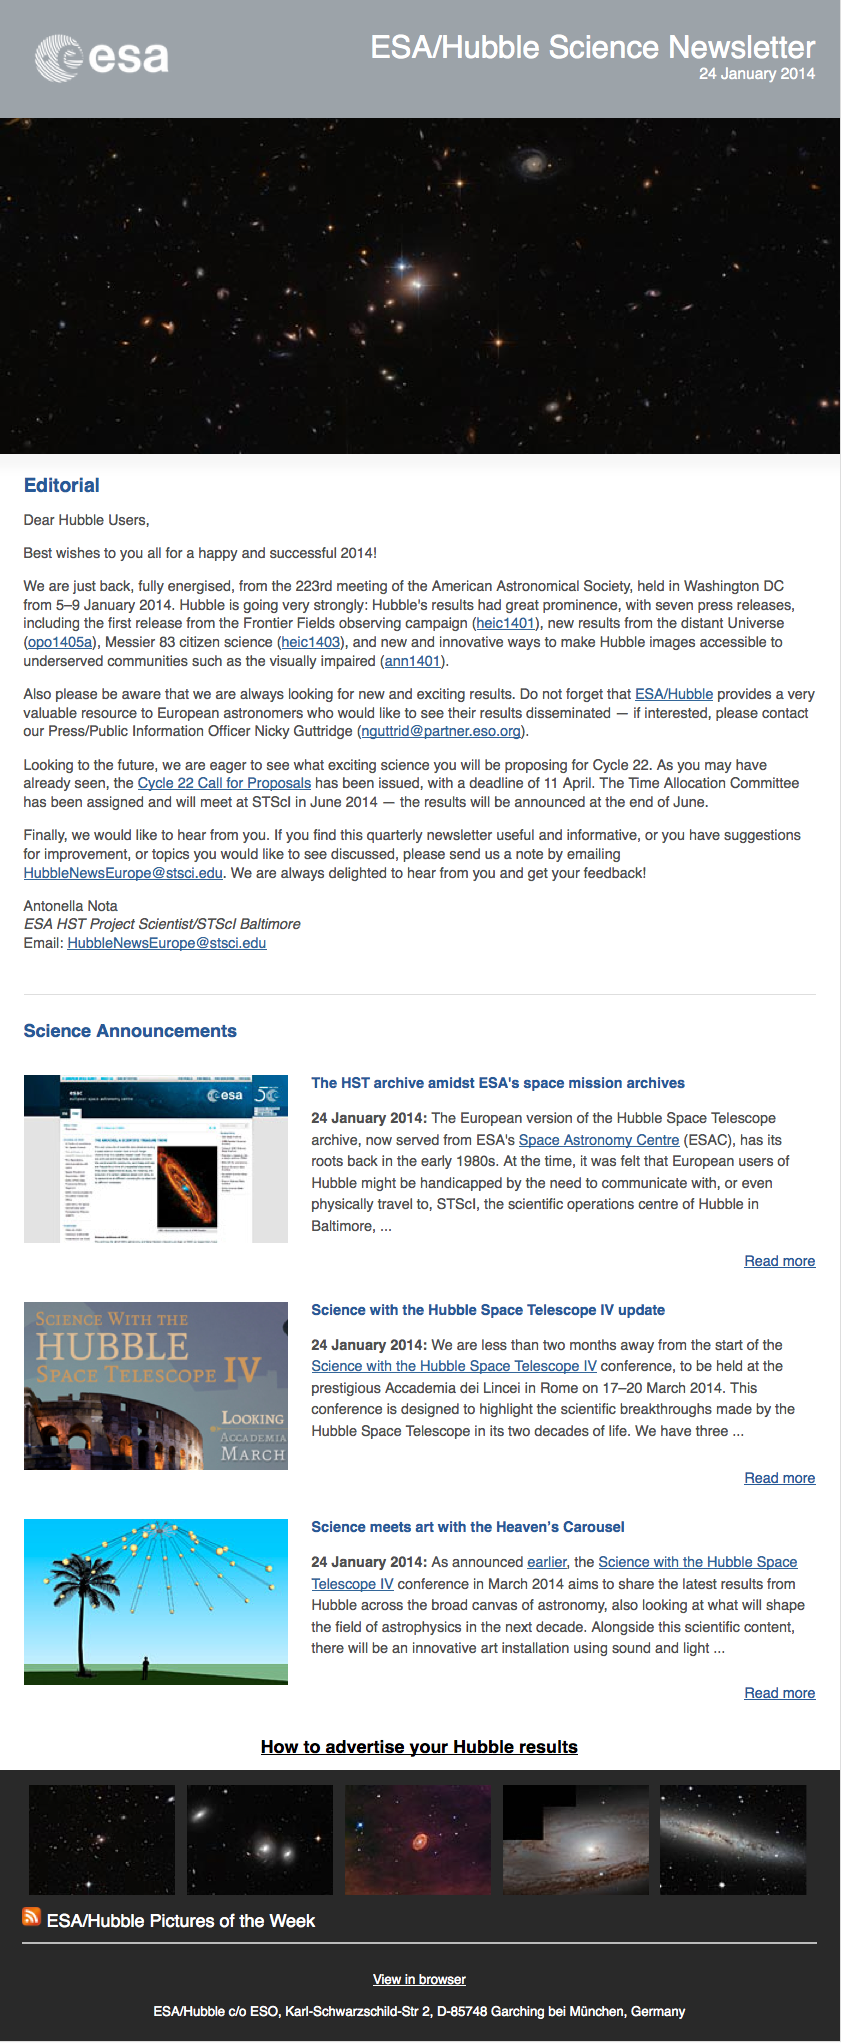

Screenshot of the January 2014 issue of ESA/Hubble Science Newsletter

Screenshot of the January 2014 issue of ESA/Hubble Science Newsletter

January 2014 edition of the ESA/Hubble Science Newsletter

Credit: NASA & ESA